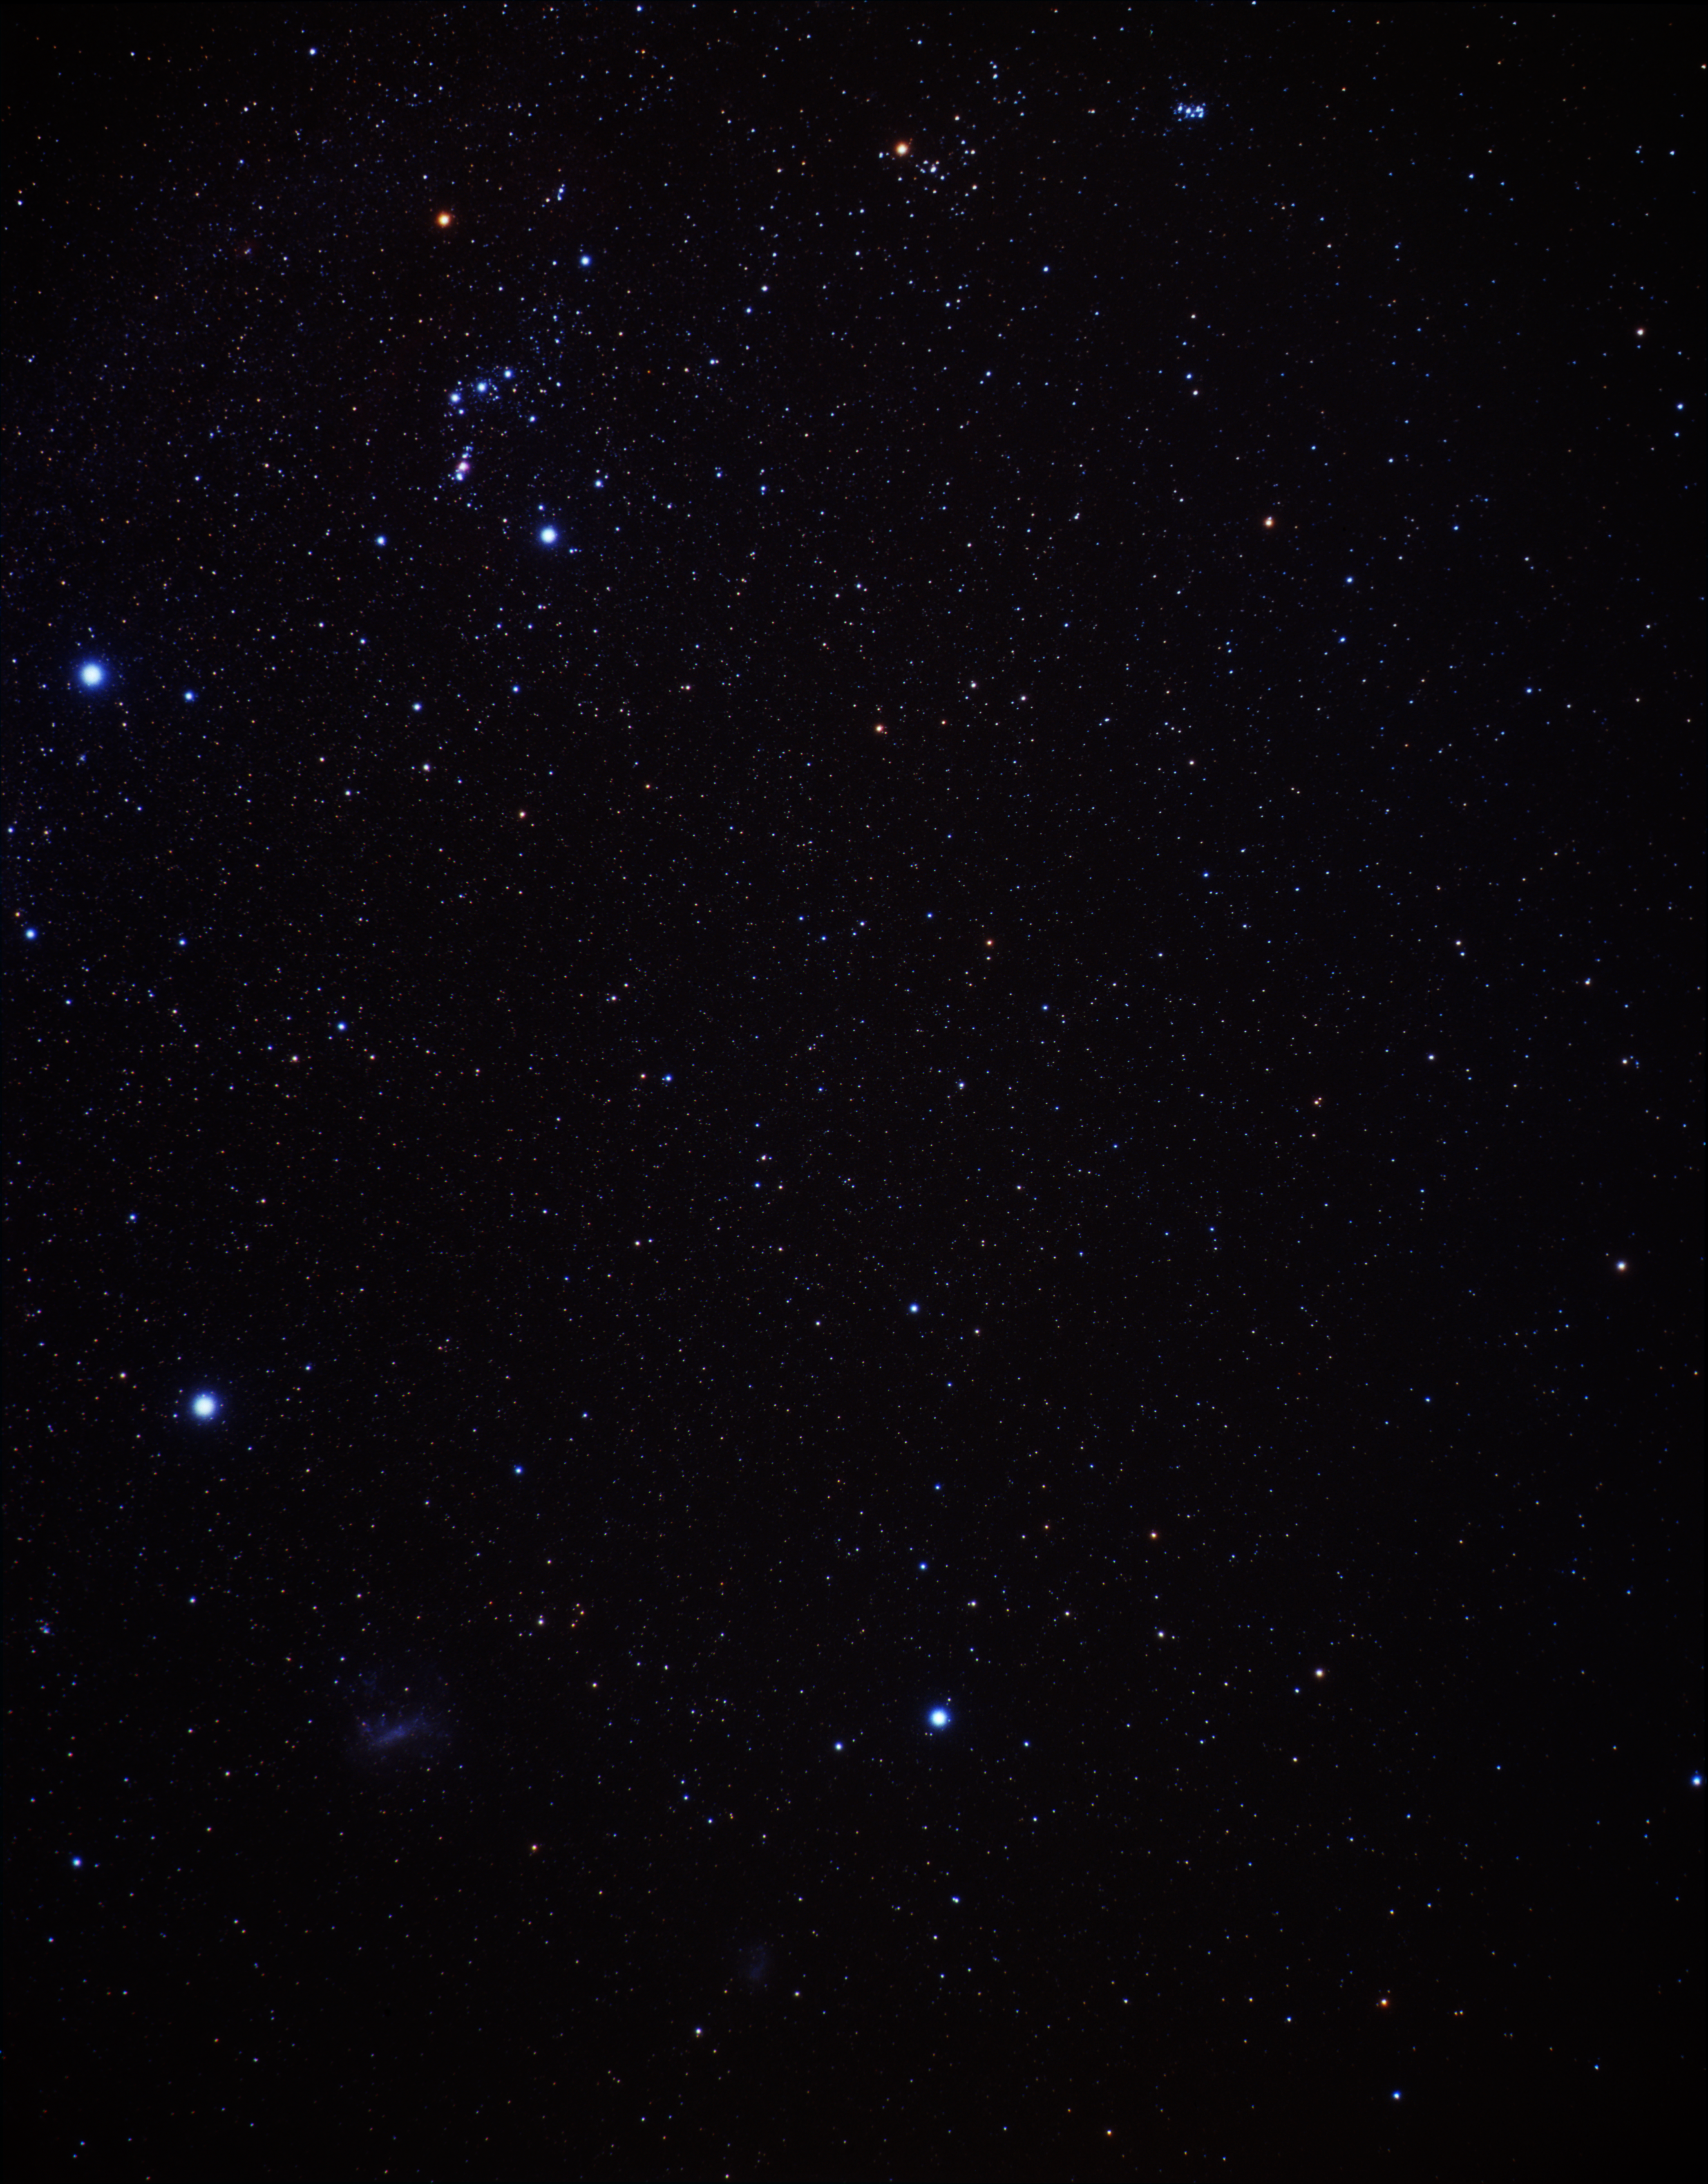

Wide-field view of NGC 1132 vicinity (ground-based image)

This image shows the region around NGC 1132, located in the constellation of Eridanus (top right part of the image).

Credit: A. Fujii